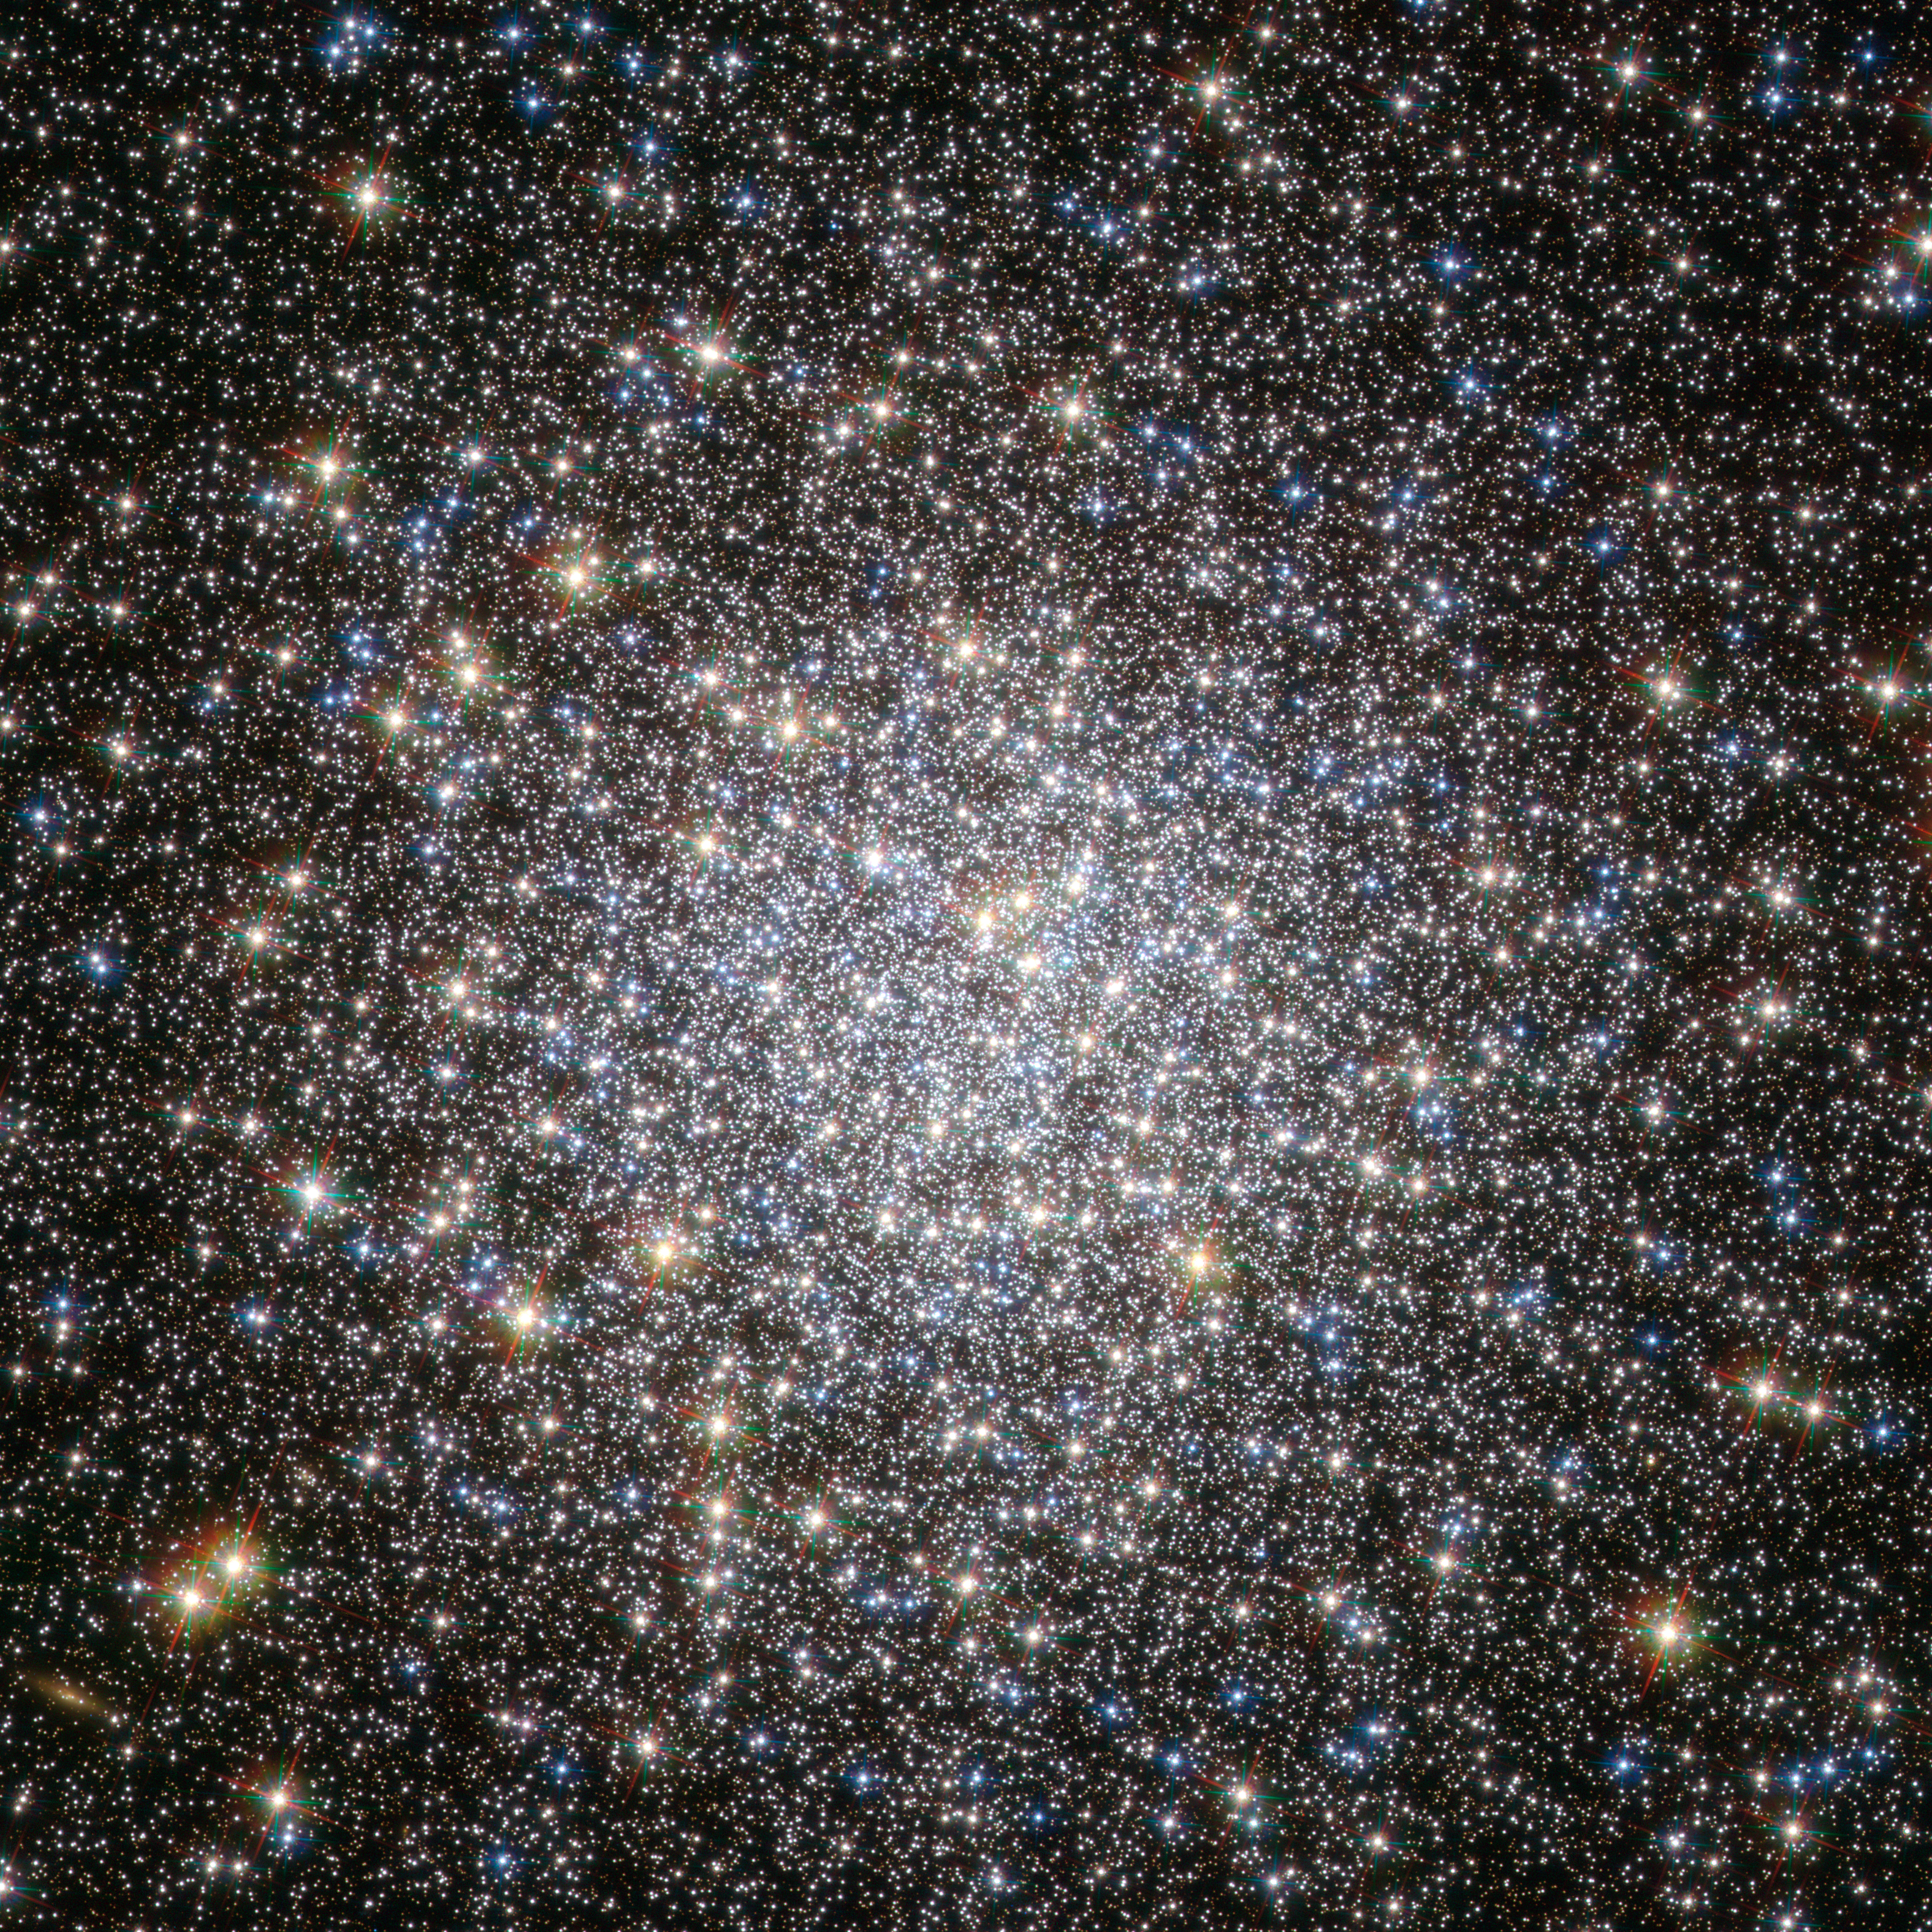

Breathing new life into an old cluster

The globular cluster Messier 5, shown here in this NASA/ESA Hubble Space Telescope image, is one of the oldest belonging to the Milky Way. The majority of its stars formed more than 12 billion years ago, but there are some unexpected newcomers on the scene, adding some vitality to this aging population.

Stars in globular clusters form in the same stellar nursery and grow old together. The most massive stars age quickly, exhausting their fuel supply in less than a million years, and end their lives in spectacular supernovae explosions. This process should have left the ancient cluster Messier 5 with only old, low-mass stars, which, as they have aged and cooled, have become red giants, while the oldest stars have evolved even further into blue horizontal branch stars.

Yet astronomers have spotted many young, blue stars in this cluster, hiding amongst the much more luminous ancient stars. Astronomers think that these laggard youngsters, called blue stragglers, were created either by stellar collisions or by the transfer of mass between binary stars. Such events are easy to imagine in densely populated globular clusters, in which up to a few million stars are tightly packed together.

Messier 5 lies at a distance of about 25 000 light-years in the constellation of Serpens (The Snake). This image was taken with Wide Field Channel of Hubble’s Advanced Camera for Surveys. The picture was created from images taken through a blue filter (F435W, coloured blue), a red filter (F625W, coloured green) and a near-infrared filter (F814W, coloured red). The total exposure times per filter were 750 s, 400 s and 567 s, respectively. The field of view is about 2.6 arcminutes across.

Credit: ESA/Hubble & NASA